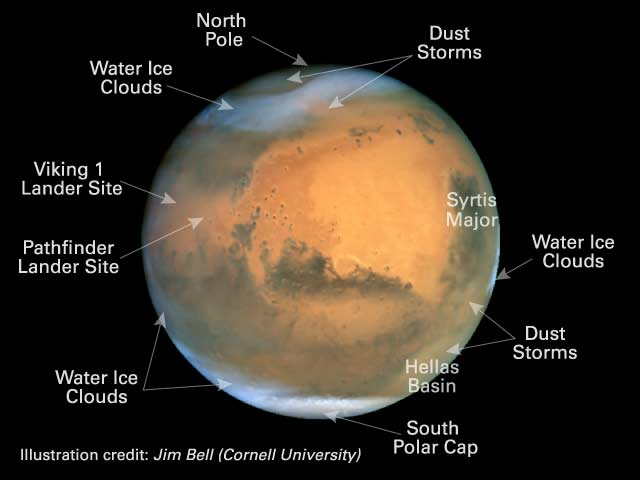

The Martian Yellow Pages

In this image some of the most important Martian sites are listed.

Credit: Jim Bell (Cornell University)